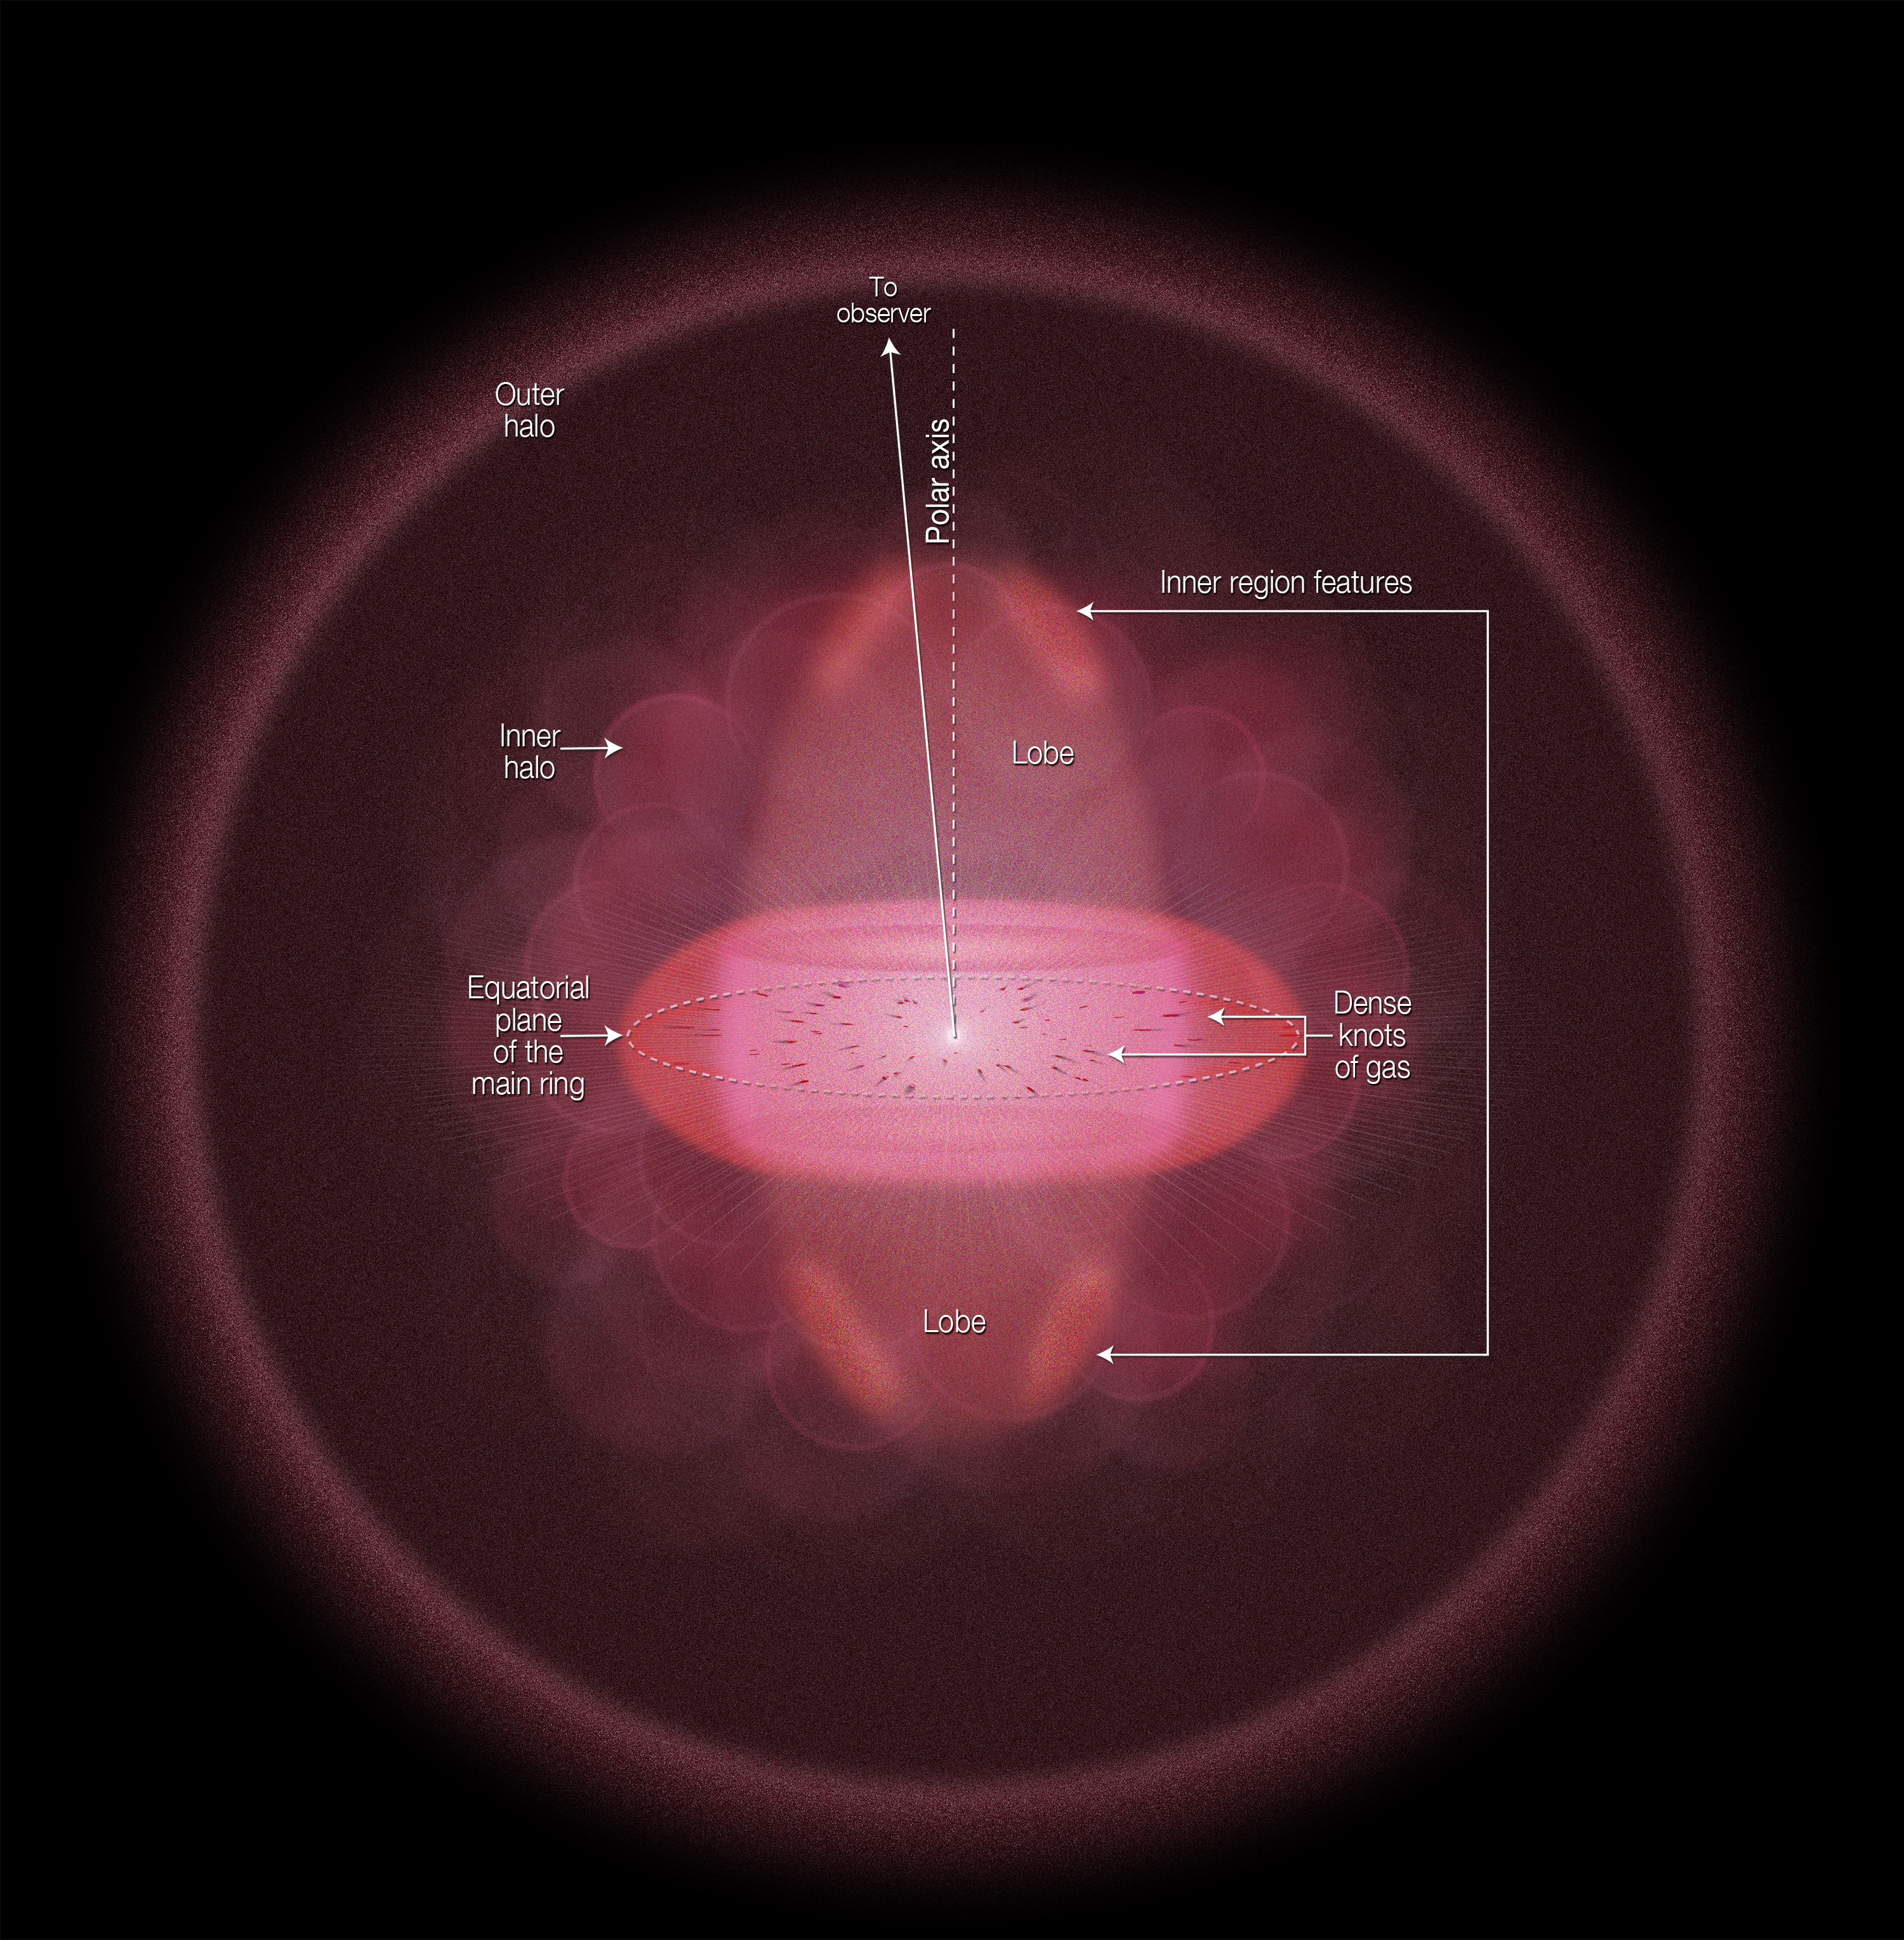

The geometry and structure of the Ring Nebula (Messier 57)

This schematic shows the geometry and structure of the Ring Nebula (Messier 57) as viewed side-on. This shows the nebula’s wide halo, inner region, lower-density lobes of material stretching towards and away from us, and the prominent, glowing disc.

We are gazing almost directly down one of the poles of this structure, and view the brightest part of this nebula as the colourful main “ring”. This is composed of gas thrown off by a dying star at the centre of the nebula.

Credit: NASA, ESA, and A. Feild (STScI)